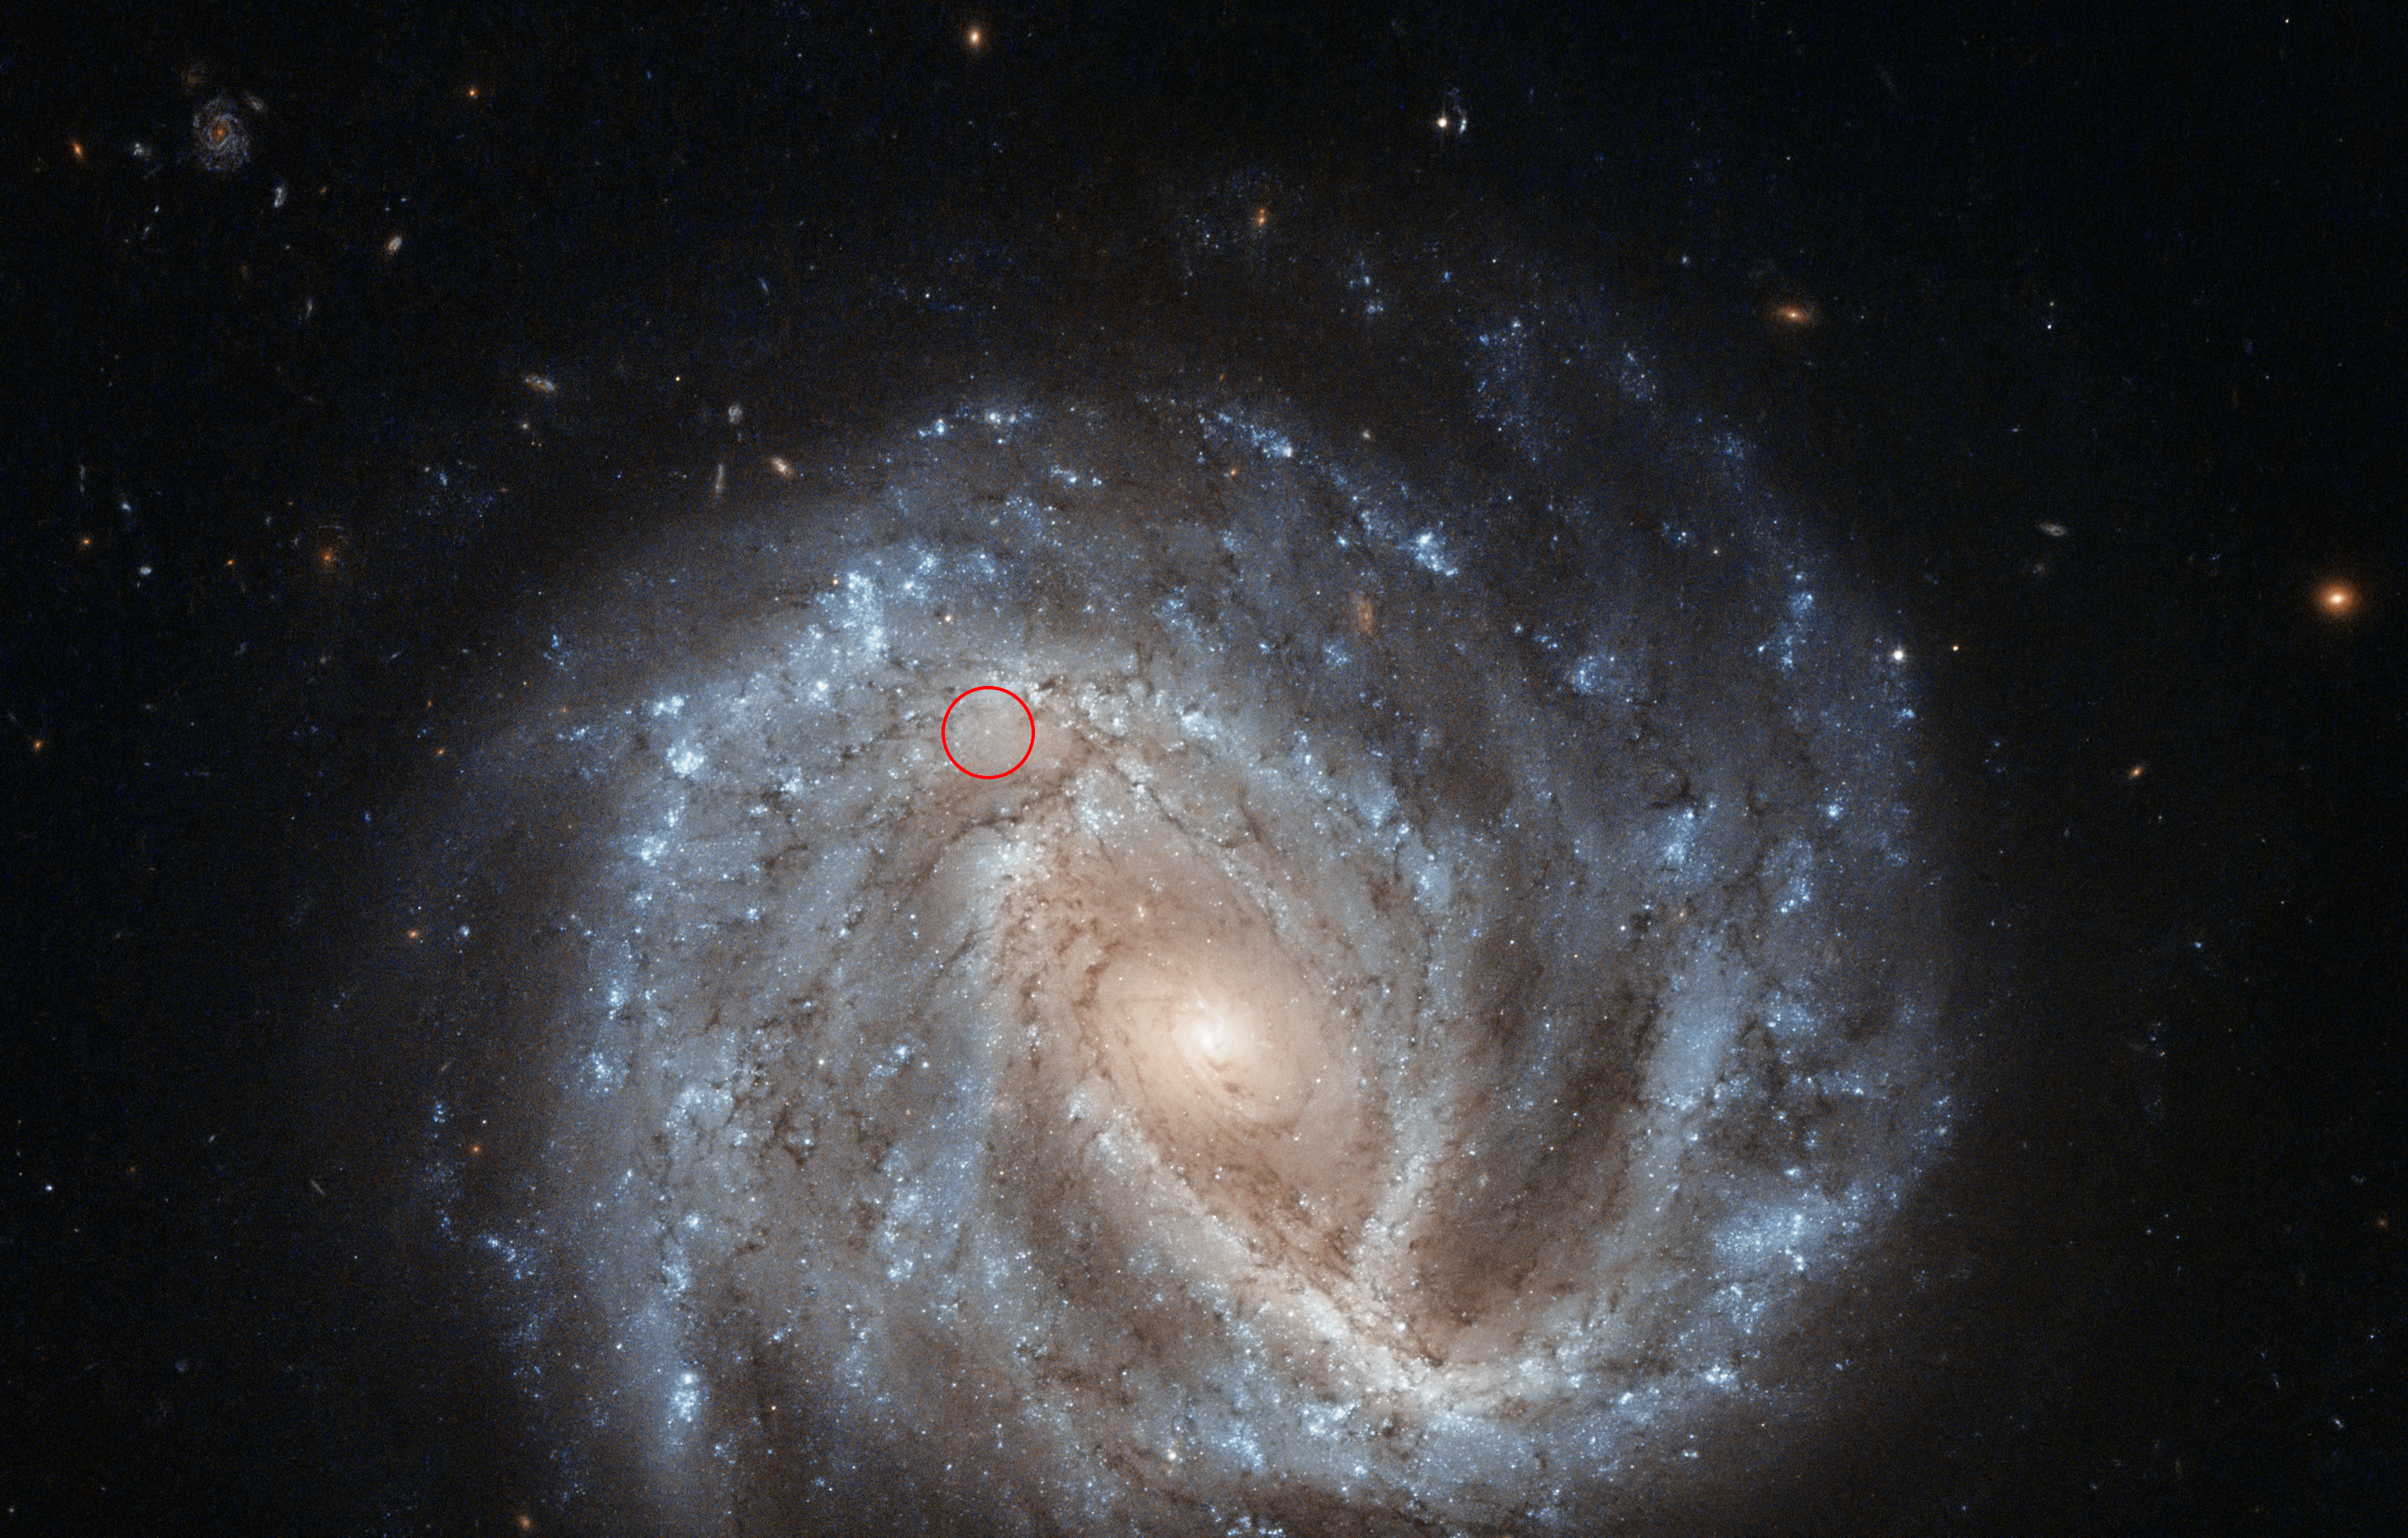

A curious supernova in NGC 2441 (annotated)

Annotated view of supernova SN1995E in NGC 2441.

Credit: ESA/Hubble & NASA Acknowledgement: Nick Rose